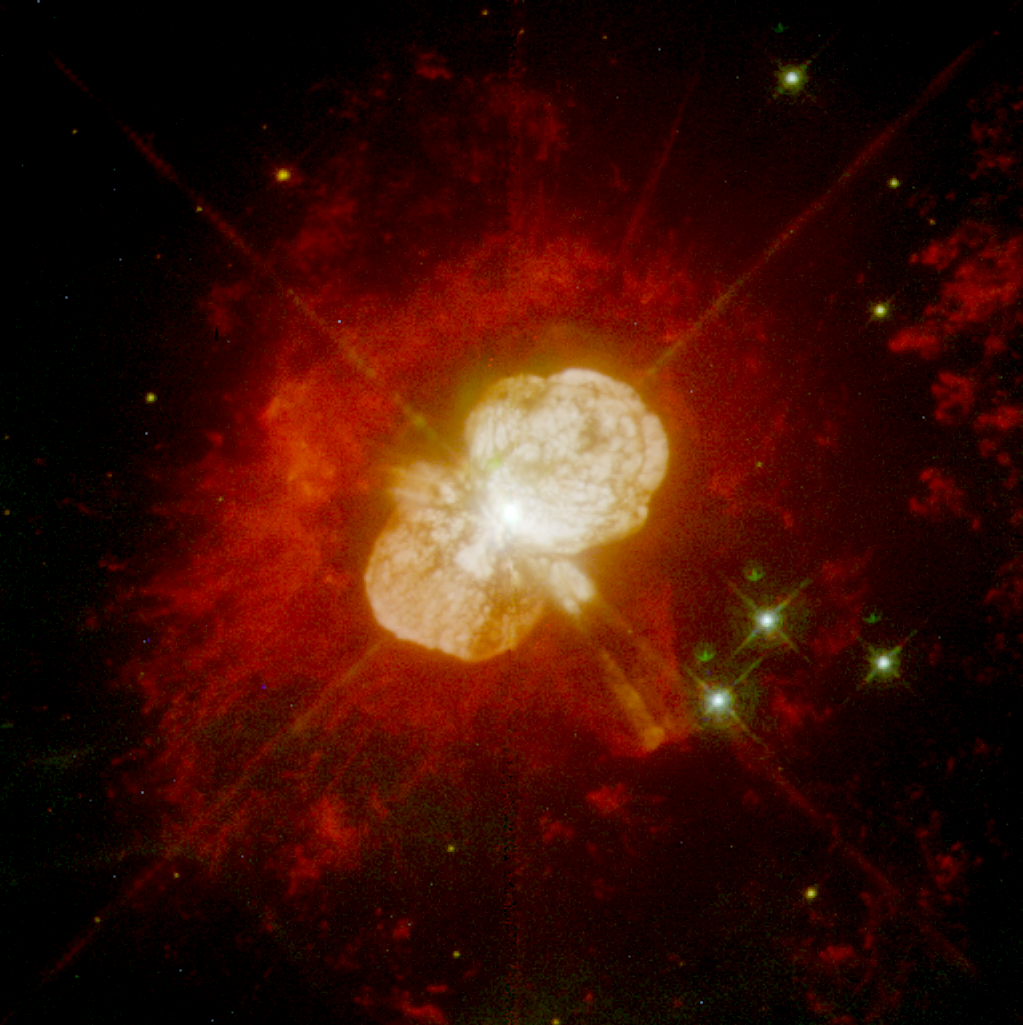

Eta Carinae

A NASA/ESA Hubble Space Telescope "natural color" image of the material surrounding the star Eta Carinae, as imaged by the Wide Field Planetary Camera 2 (WFPC-2).

Credit: J. Hester/Arizona state University, NASA/ESA